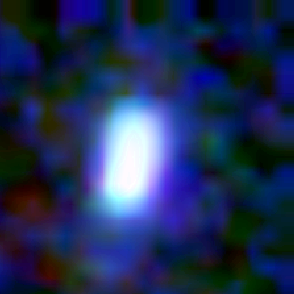

Galaxy building blocks

This is one Proto Galaxy out of a series of 18, taken by the Wide Field Planetary Camera 2.

Credit: Rogier Windhorst and Sam Pascarelle (Arizona State University) and NASA/ESA